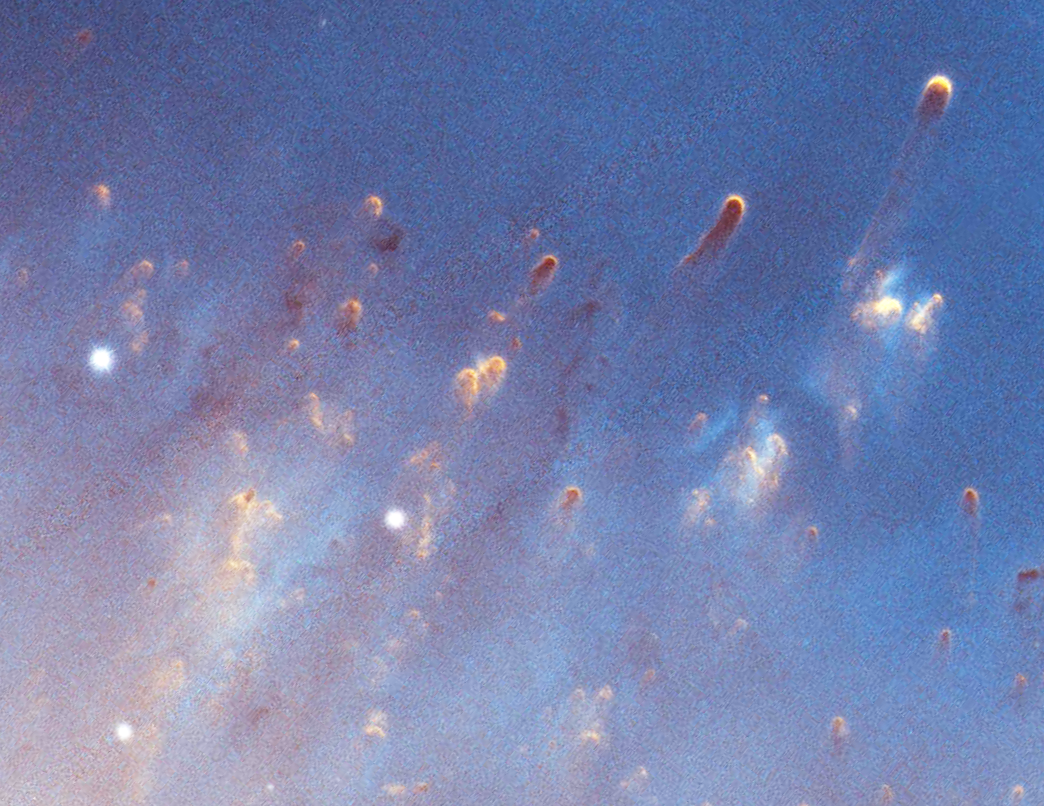

Helix Nebula: Detail Image 1

Detailed image of the Helix Nebula.

Credit: NASA, NOAO, ESA, the Hubble Helix Nebula Team, M. Meixner (STScI), and T.A. Rector (NRAO).